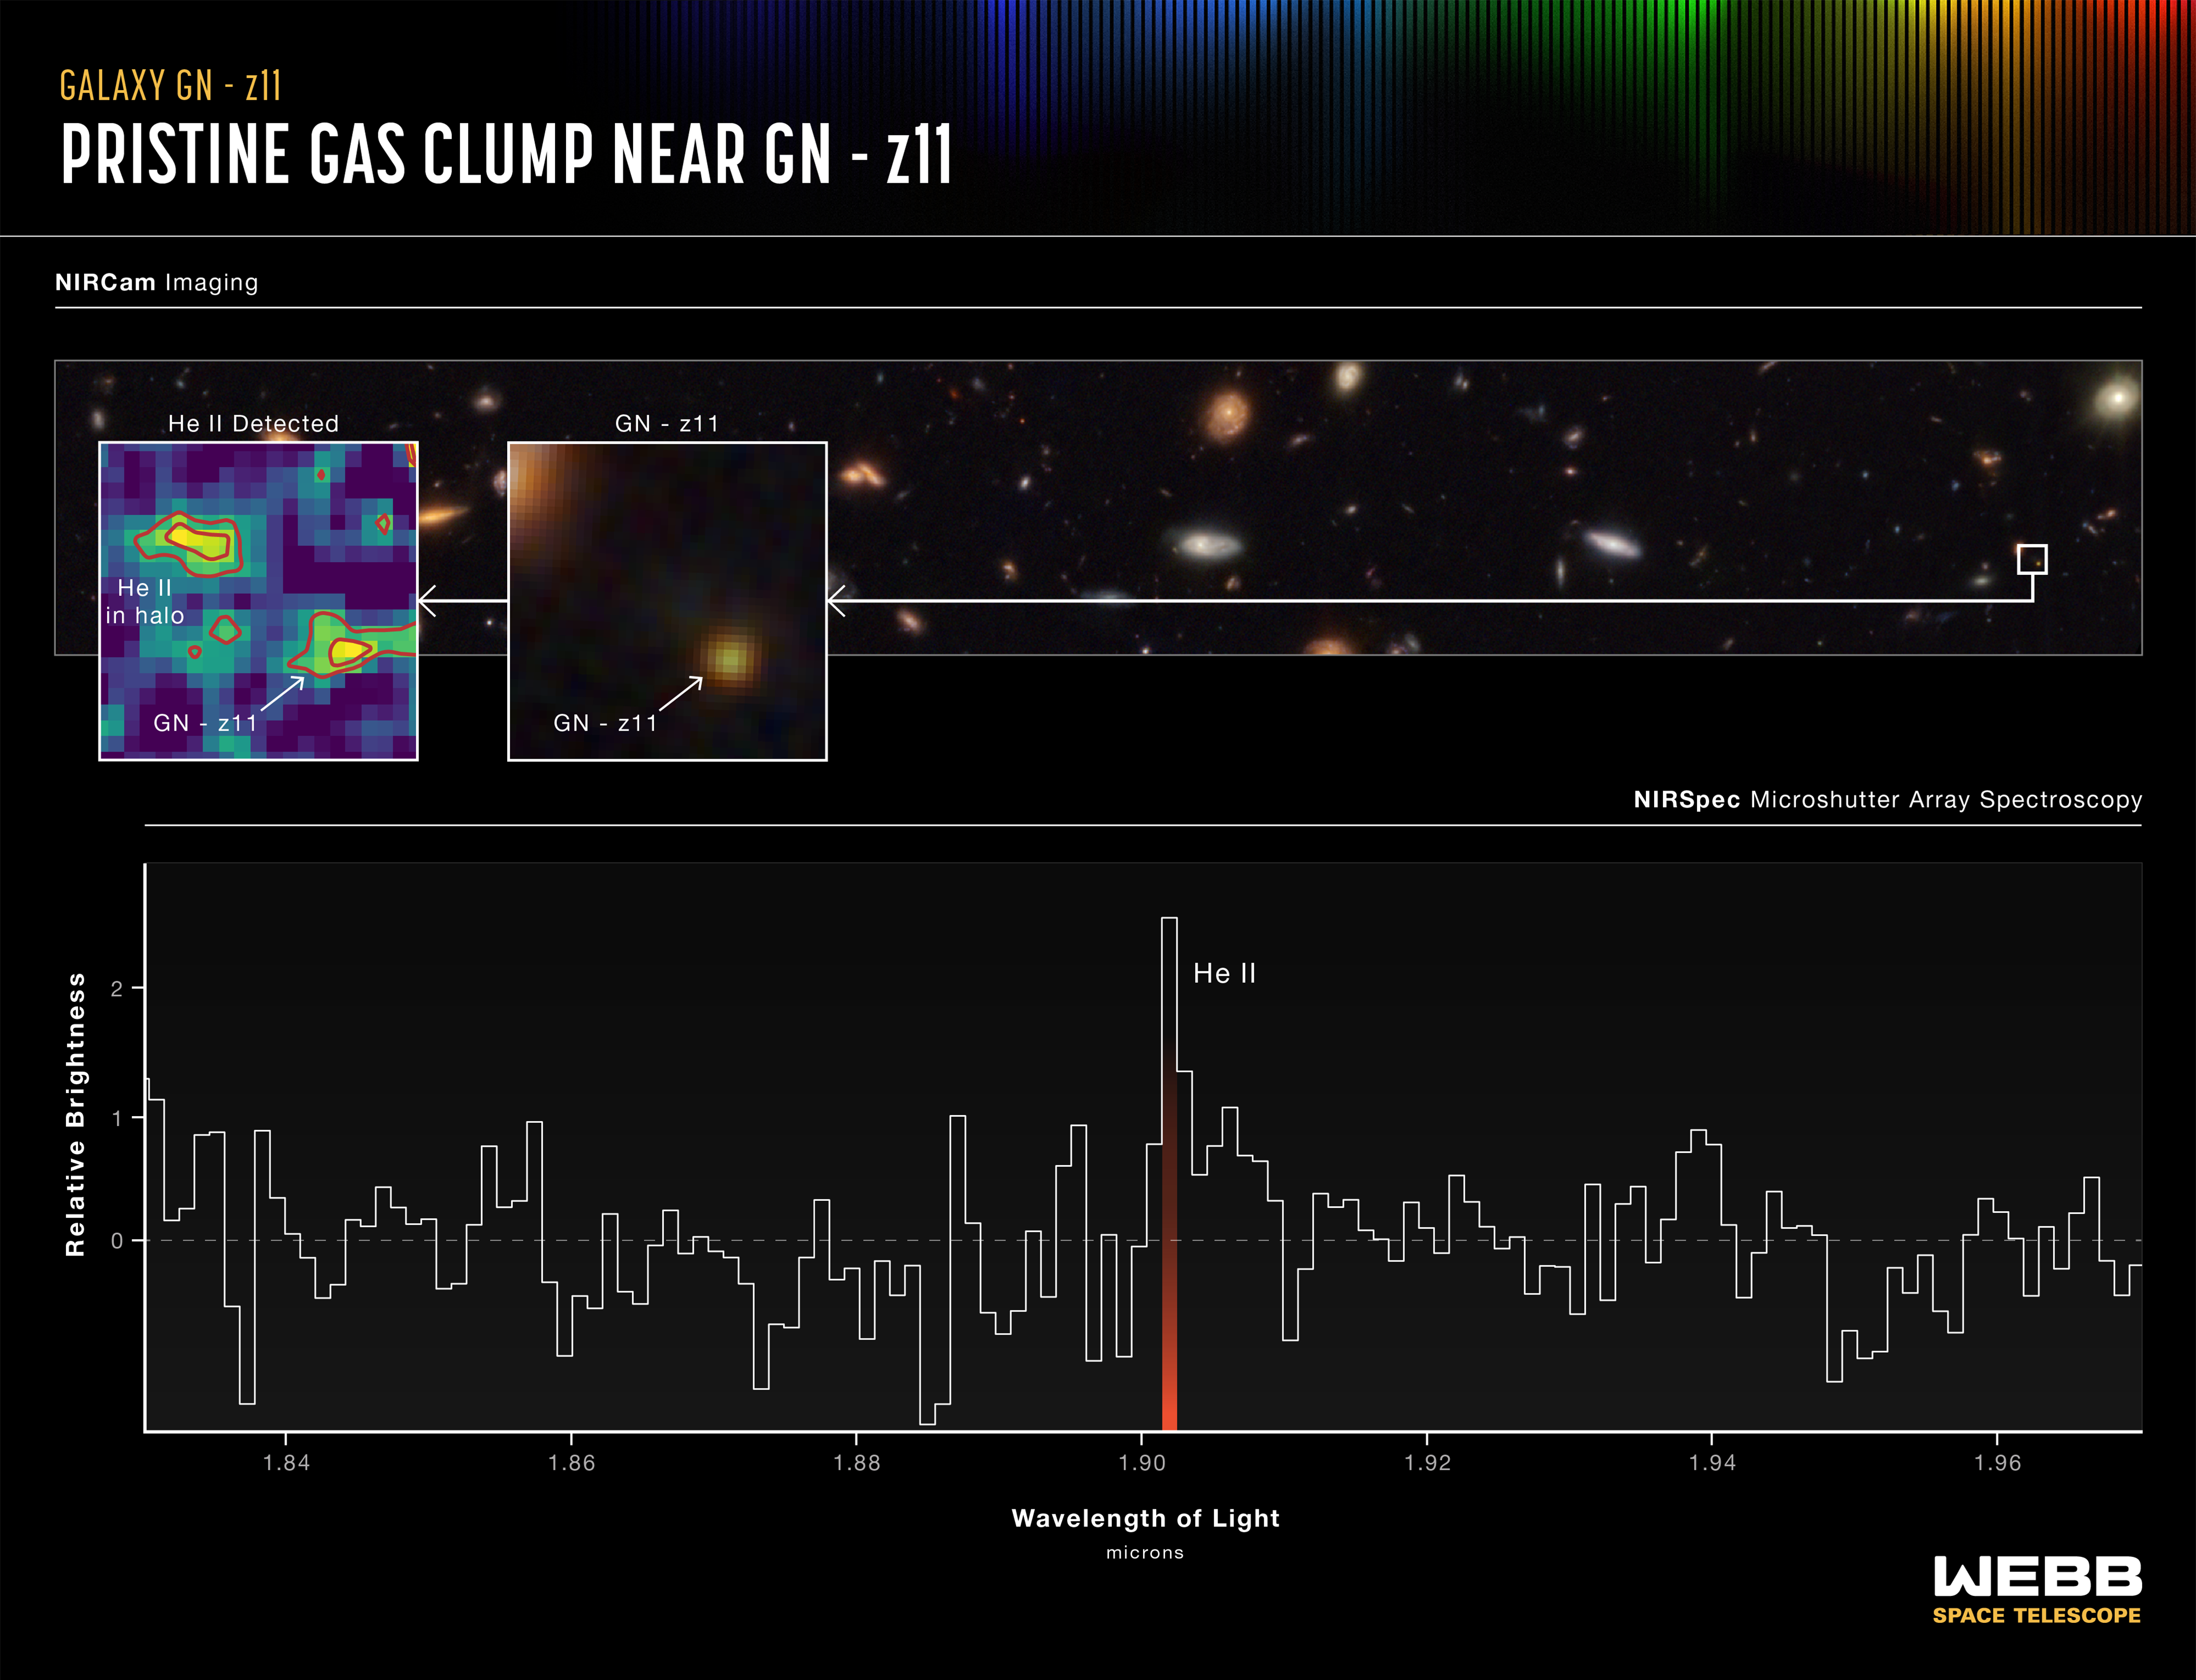

Spectrum of GN-z11

This two-part graphic shows evidence of a gaseous clump of helium in the halo surrounding the galaxy GN-z11. In the top portion, at the far right, a small box identifies GN-z11 in a field of galaxies. The middle box shows a zoomed-in image of the galaxy. The box at the far left displays a map of the helium gas in the halo of GN-z11, including a clump that does not appear in the infrared colours shown in the middle panel. In the lower half of the graphic, a spectrum shows the distinct ‘fingerprint’ of helium in the halo. The full spectrum shows no evidence of other elements and so suggests that the helium clump must be fairly pristine, made almost entirely of hydrogen and helium gas left over from the Big Bang, without much contamination from heavier elements produced by stars. Theory and simulations in the vicinity of particularly massive galaxies from these epochs predict that there should be pockets of pristine gas surviving in the halo, and these may collapse and form Population III star clusters.

Credit: NASA, ESA, CSA, Ralf Crawford (STScI)